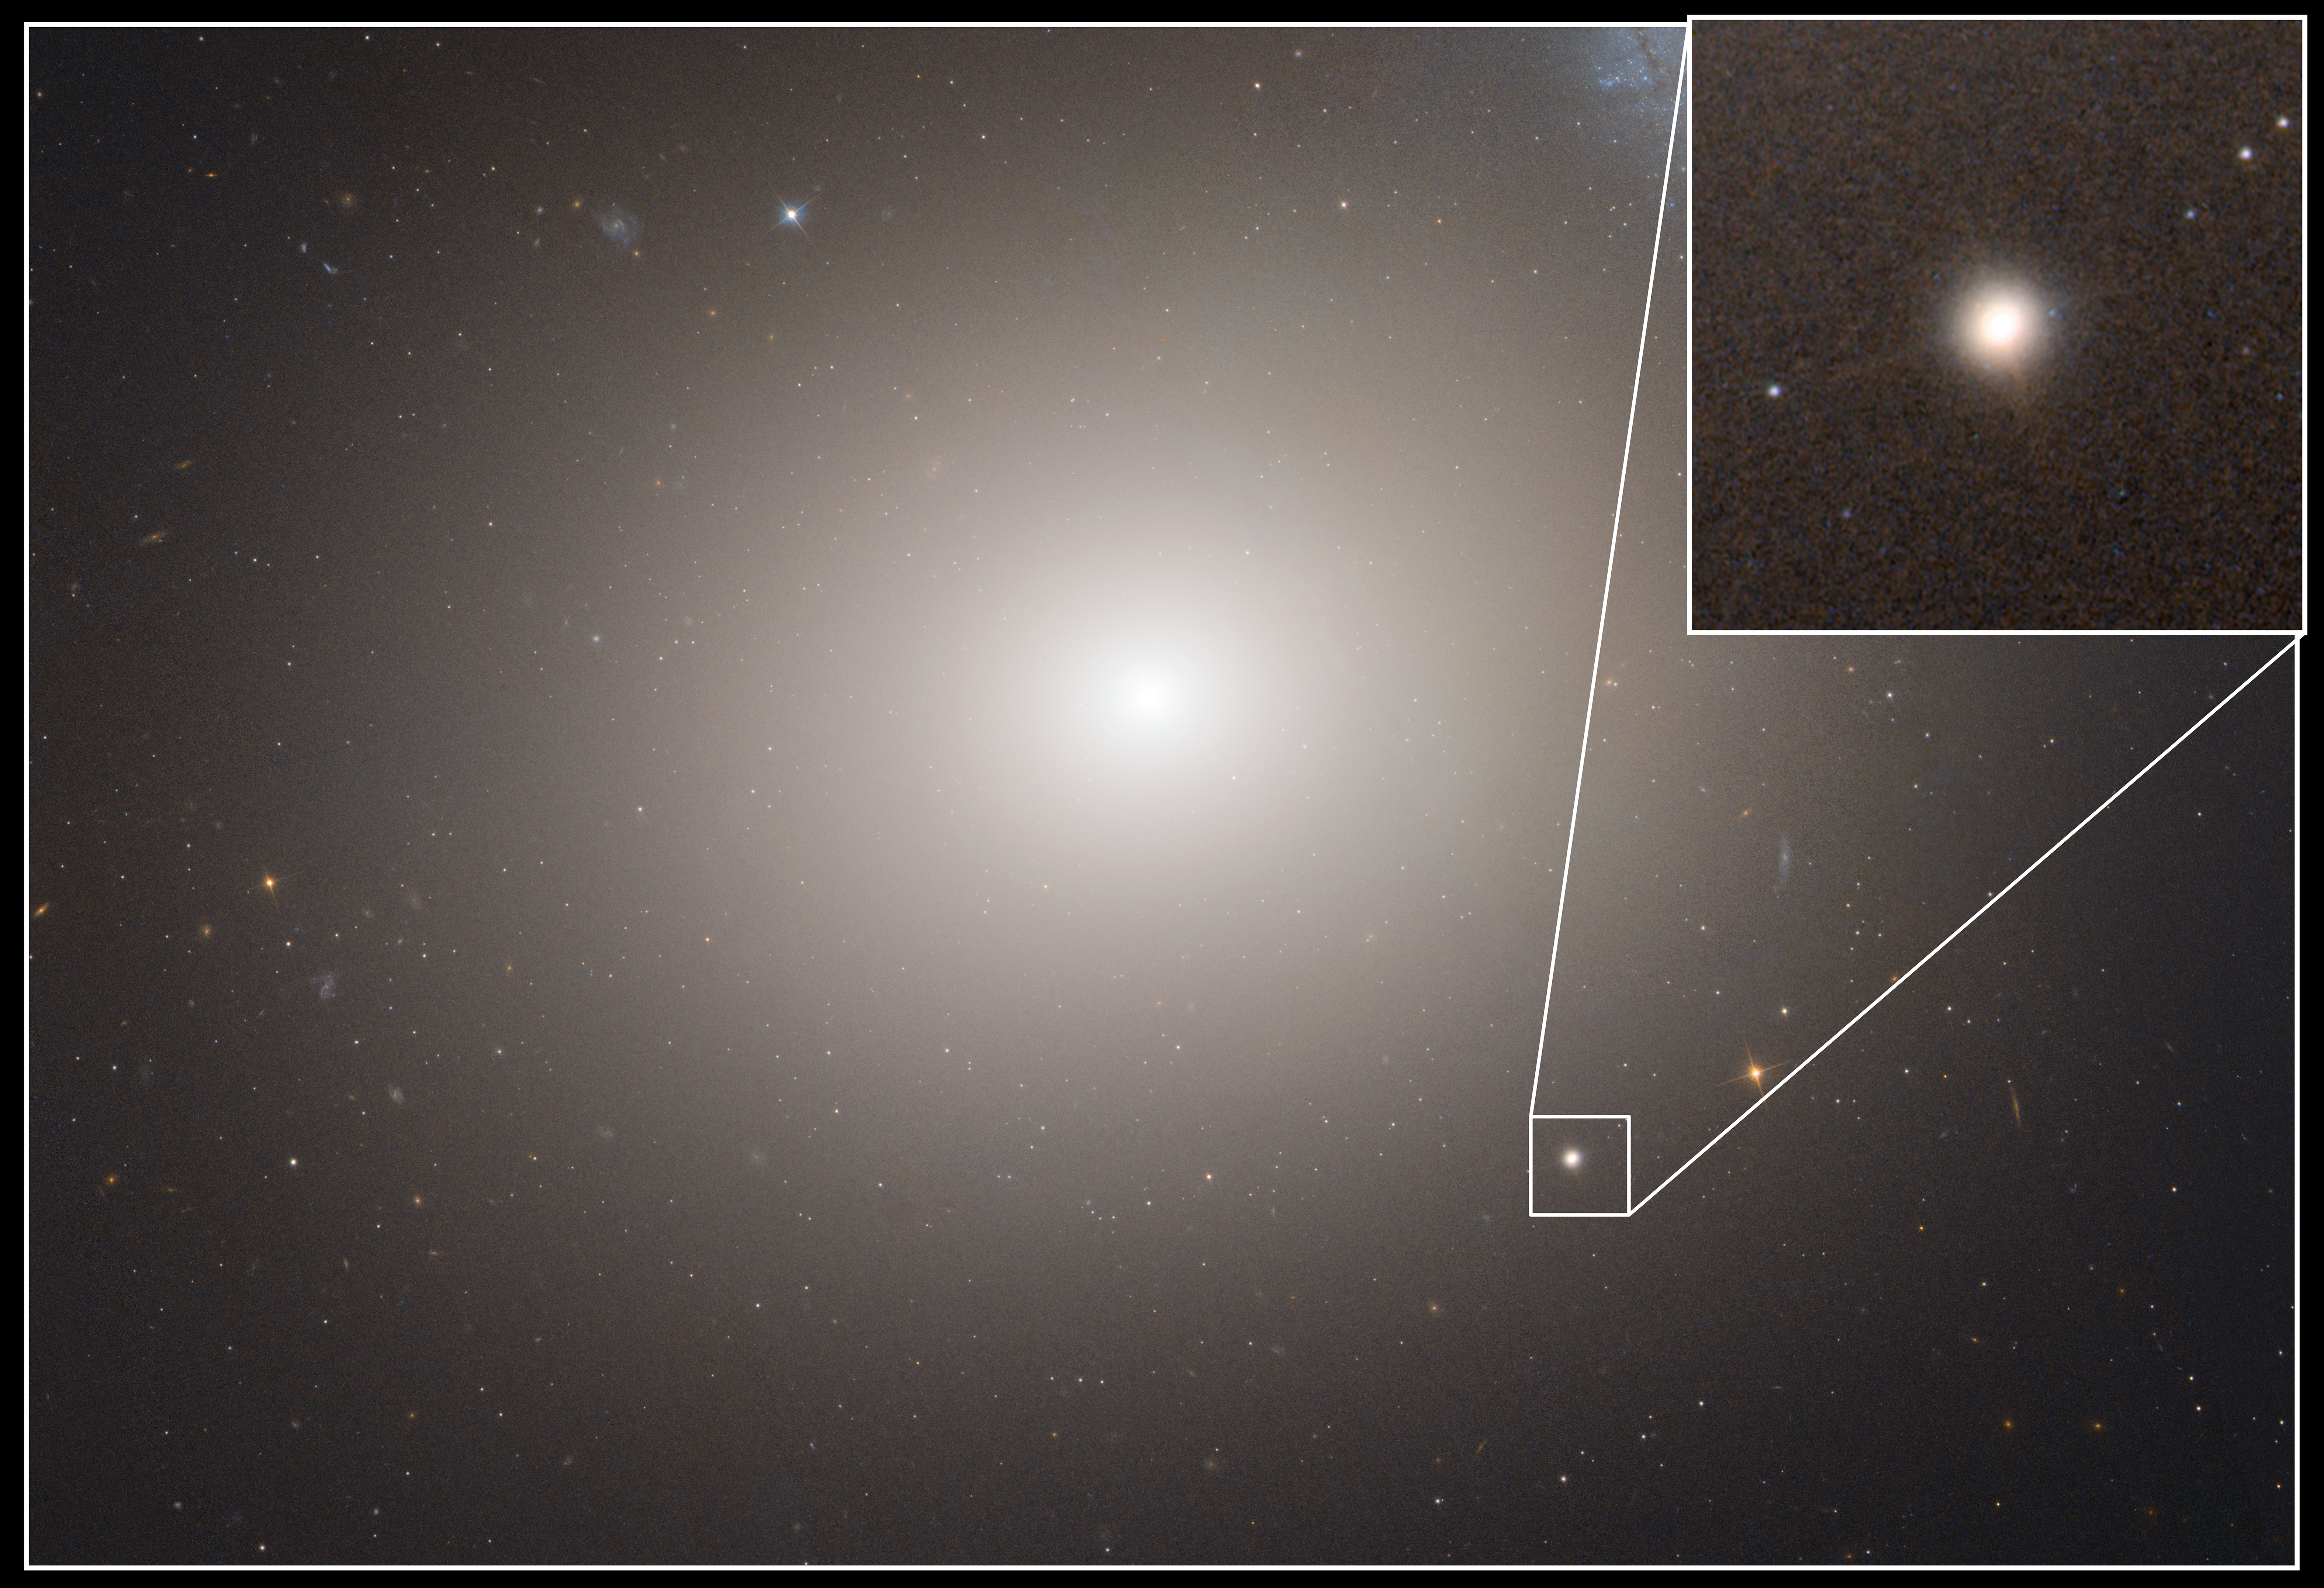

Hubble image of Messier 60 and M60-UCD1

This NASA/ESA Hubble Space Telescope image shows the massive elliptical galaxy Messier 60 (also called M60, or NGC 4649). M60 is 120 thousand light-years across and contains an estimated 400 billion stars. Highlighted in the inset is the dwarf galaxy M60-UDC1 which orbits the giant elliptical.

Lying about 50 million light-years away, M60-UCD1 is a tiny galaxy with a diameter of 300 light-years — just 1/500th of the diameter of the Milky Way! Despite its size it is pretty crowded, containing some 140 million stars.

The dwarf galaxy may actually be the stripped remnant of a larger galaxy that was torn apart during a close encounter with Messier 60. Circumstantial evidence for this comes from the recent discovery of a monster black hole, which is not visible in this image, at the centre of the dwarf. The black hole makes up 15 percent of the mass of the entire galaxy, making it much too big to have formed inside a dwarf galaxy.

Credit: NASA, ESA and A. Seth (University of Utah, USA)